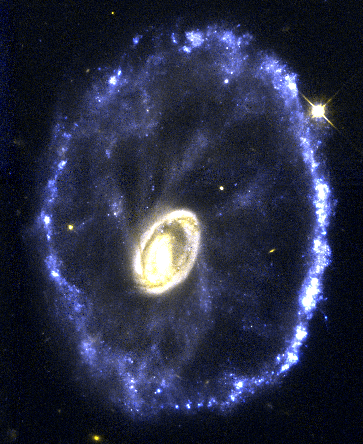

The Cartwheel Galaxy

Located 500 million light-years away in the constellation Sculptor, the galaxy looks like a wagon wheel. The galaxy's nucleus is the bright object in the center of the image; the spoke-like structures are wisps of material connecting the nucleus to the outer ring of young stars. The galaxy's unusual configuration was created by a nearly head-on collision with a smaller galaxy about 200 million years ago.

Credit: Curt Struck and Philip Appleton (Iowa State University), Kirk Borne (Hughes STX Corporation), and Ray Lucas ( Space Telescope Science Institute), and NASA/ESA